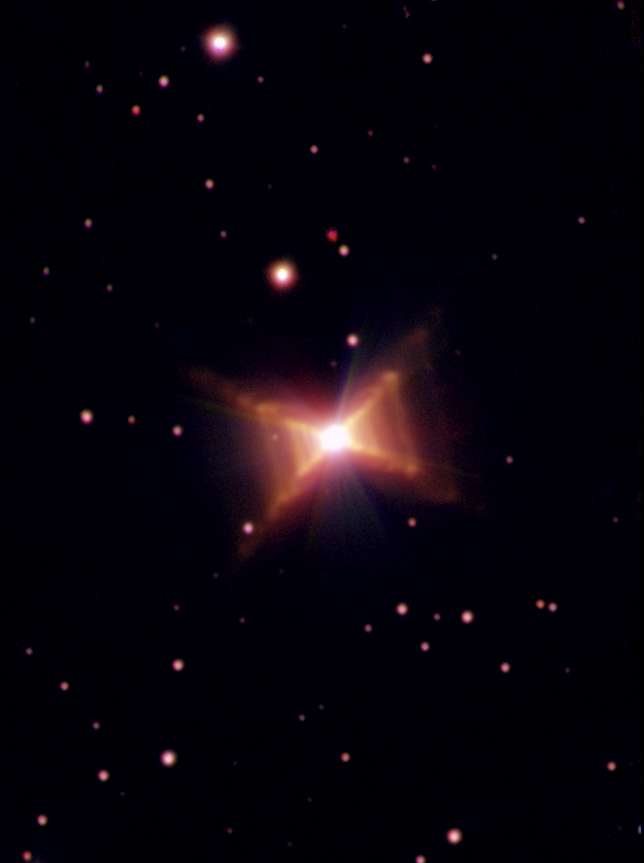

Red Rectangle overview image 2 [ground-based]

This ground-based image was taken with the European Southern Observatory's New Technology Telescope at La Silla Observatory. The image is constructed from three exposures through a blue filter, Hydrogen-alpha filter and a red filter. Note that the HST picture only shows the innermost part of the nebula.

Credit: ESA, ESO and Hans van Winckel (Catholic University of Leuven, Belgium)